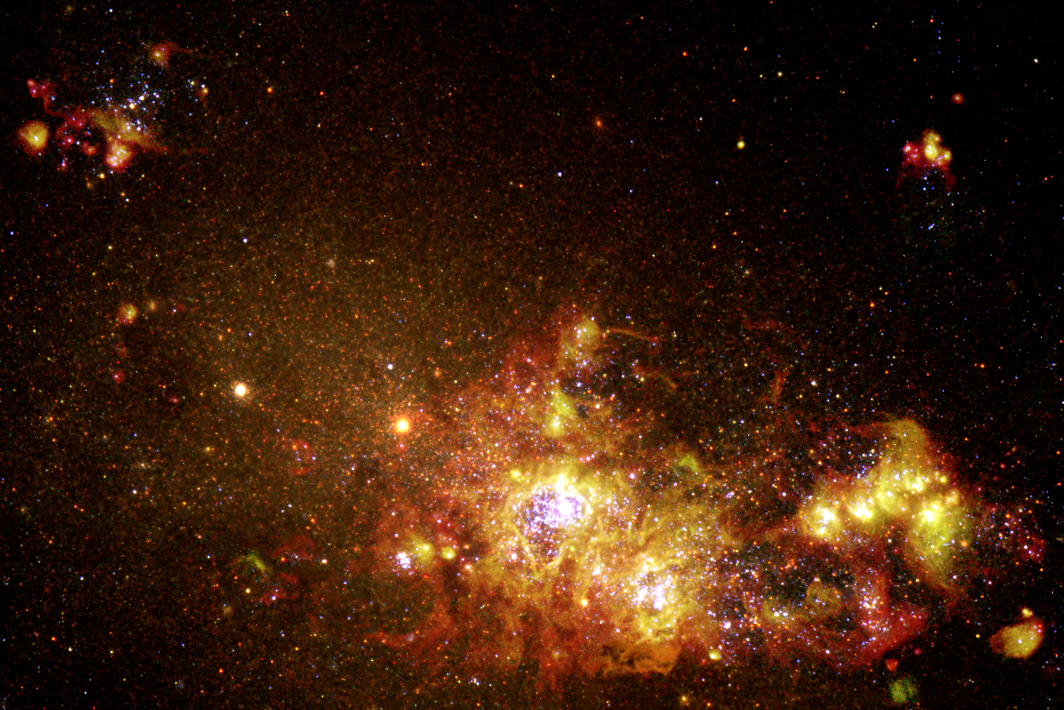

Fireworks of Star Formation Light Up a Galaxy

Newly released images obtained with the NASA/ESA Hubble Space Telescope in July 1997 reveal episodes of star formation that are occurring across the face of the nearby galaxy NGC 4214. Located some 13 million light-years from Earth, NGC 4214 is currently forming clusters of new stars from its interstellar gas and dust. In the Hubble image, we can see a sequence of steps in the formation and evolution of stars and star clusters. The picture was created from exposures taken in several colour filters with Hubble's Wide Field Planetary Camera 2.

Credit: NASA/ESA and The Hubble Heritage Team (STScI)